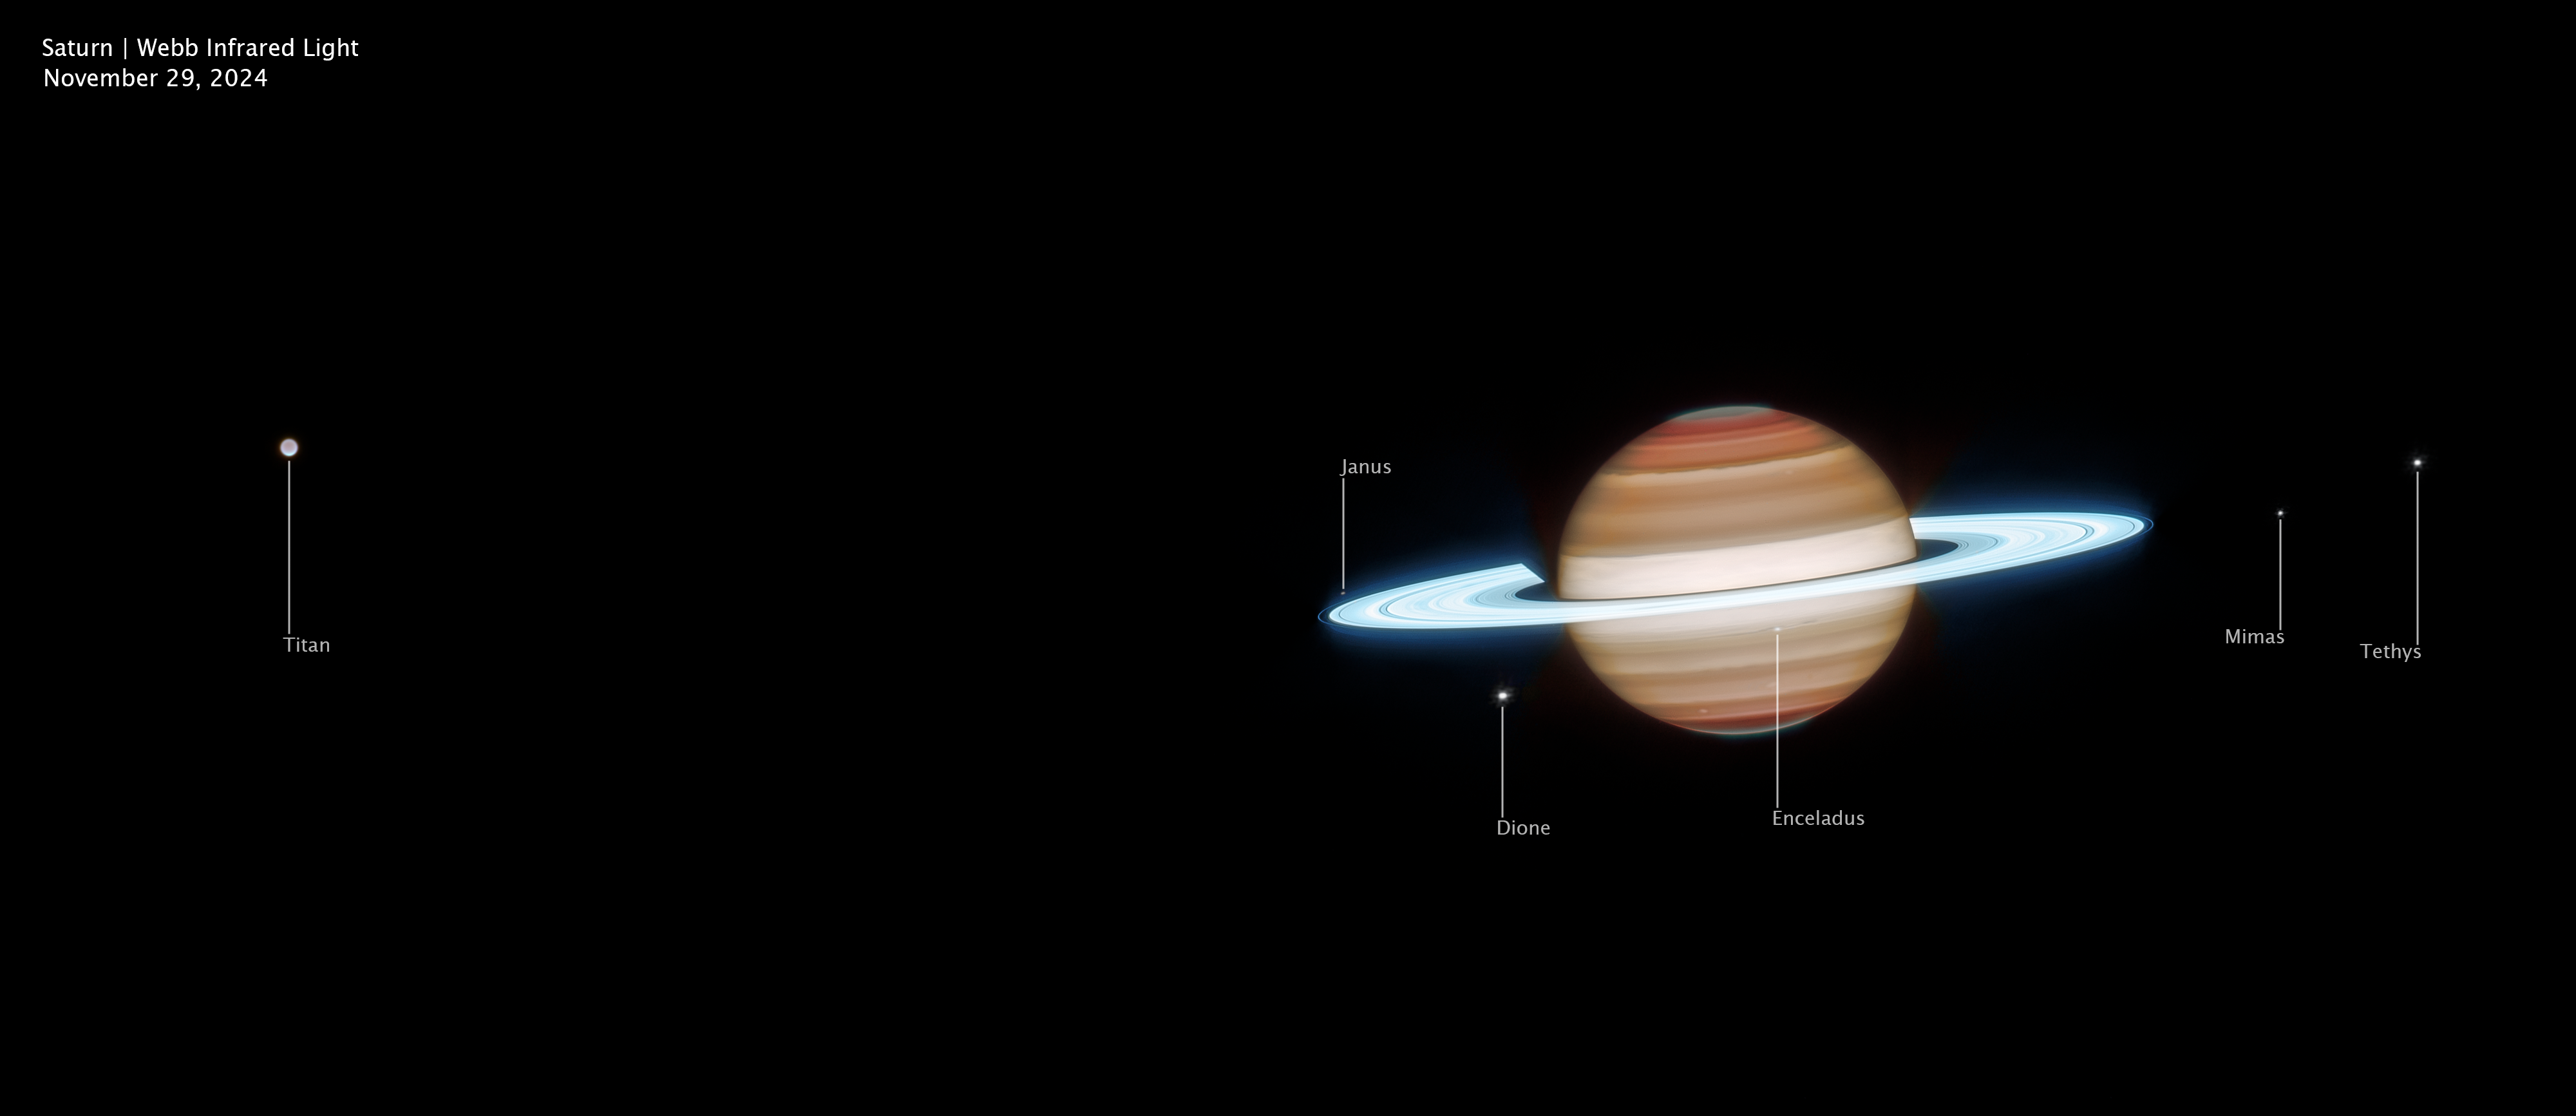

Saturn (Webb image, wide view, annotated)

This wider infrared view of Saturn was captured on 29 November 2024 by the NASA/ESA/CSA James Webb Space Telescope. Saturn’s bright rings glow in reflected sunlight, and Webb’s observations reveal structures at different altitudes throughout the planet’s banded atmosphere. Several of Saturn’s larger moons appear across the field of view, including Titan (far left), Janus, Dione, Enceladus, Mimas, and Tethys.

Credit: NASA, ESA, CSA, STScI; Image Processing: J. DePasquale (STScI)